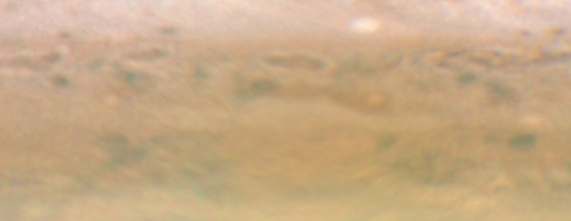

Jupiter: 3 November 2009

Image taken with Hubble's Wide Field Camera 3 on 3 November 2009.

Credit: NASA, ESA, M. Wong (University of California, Berkeley), H.B. Hammel (Space Science Institute, Boulder, Colo.), I. de Pater (University of California, Berkeley), and the Jupiter Impact Team